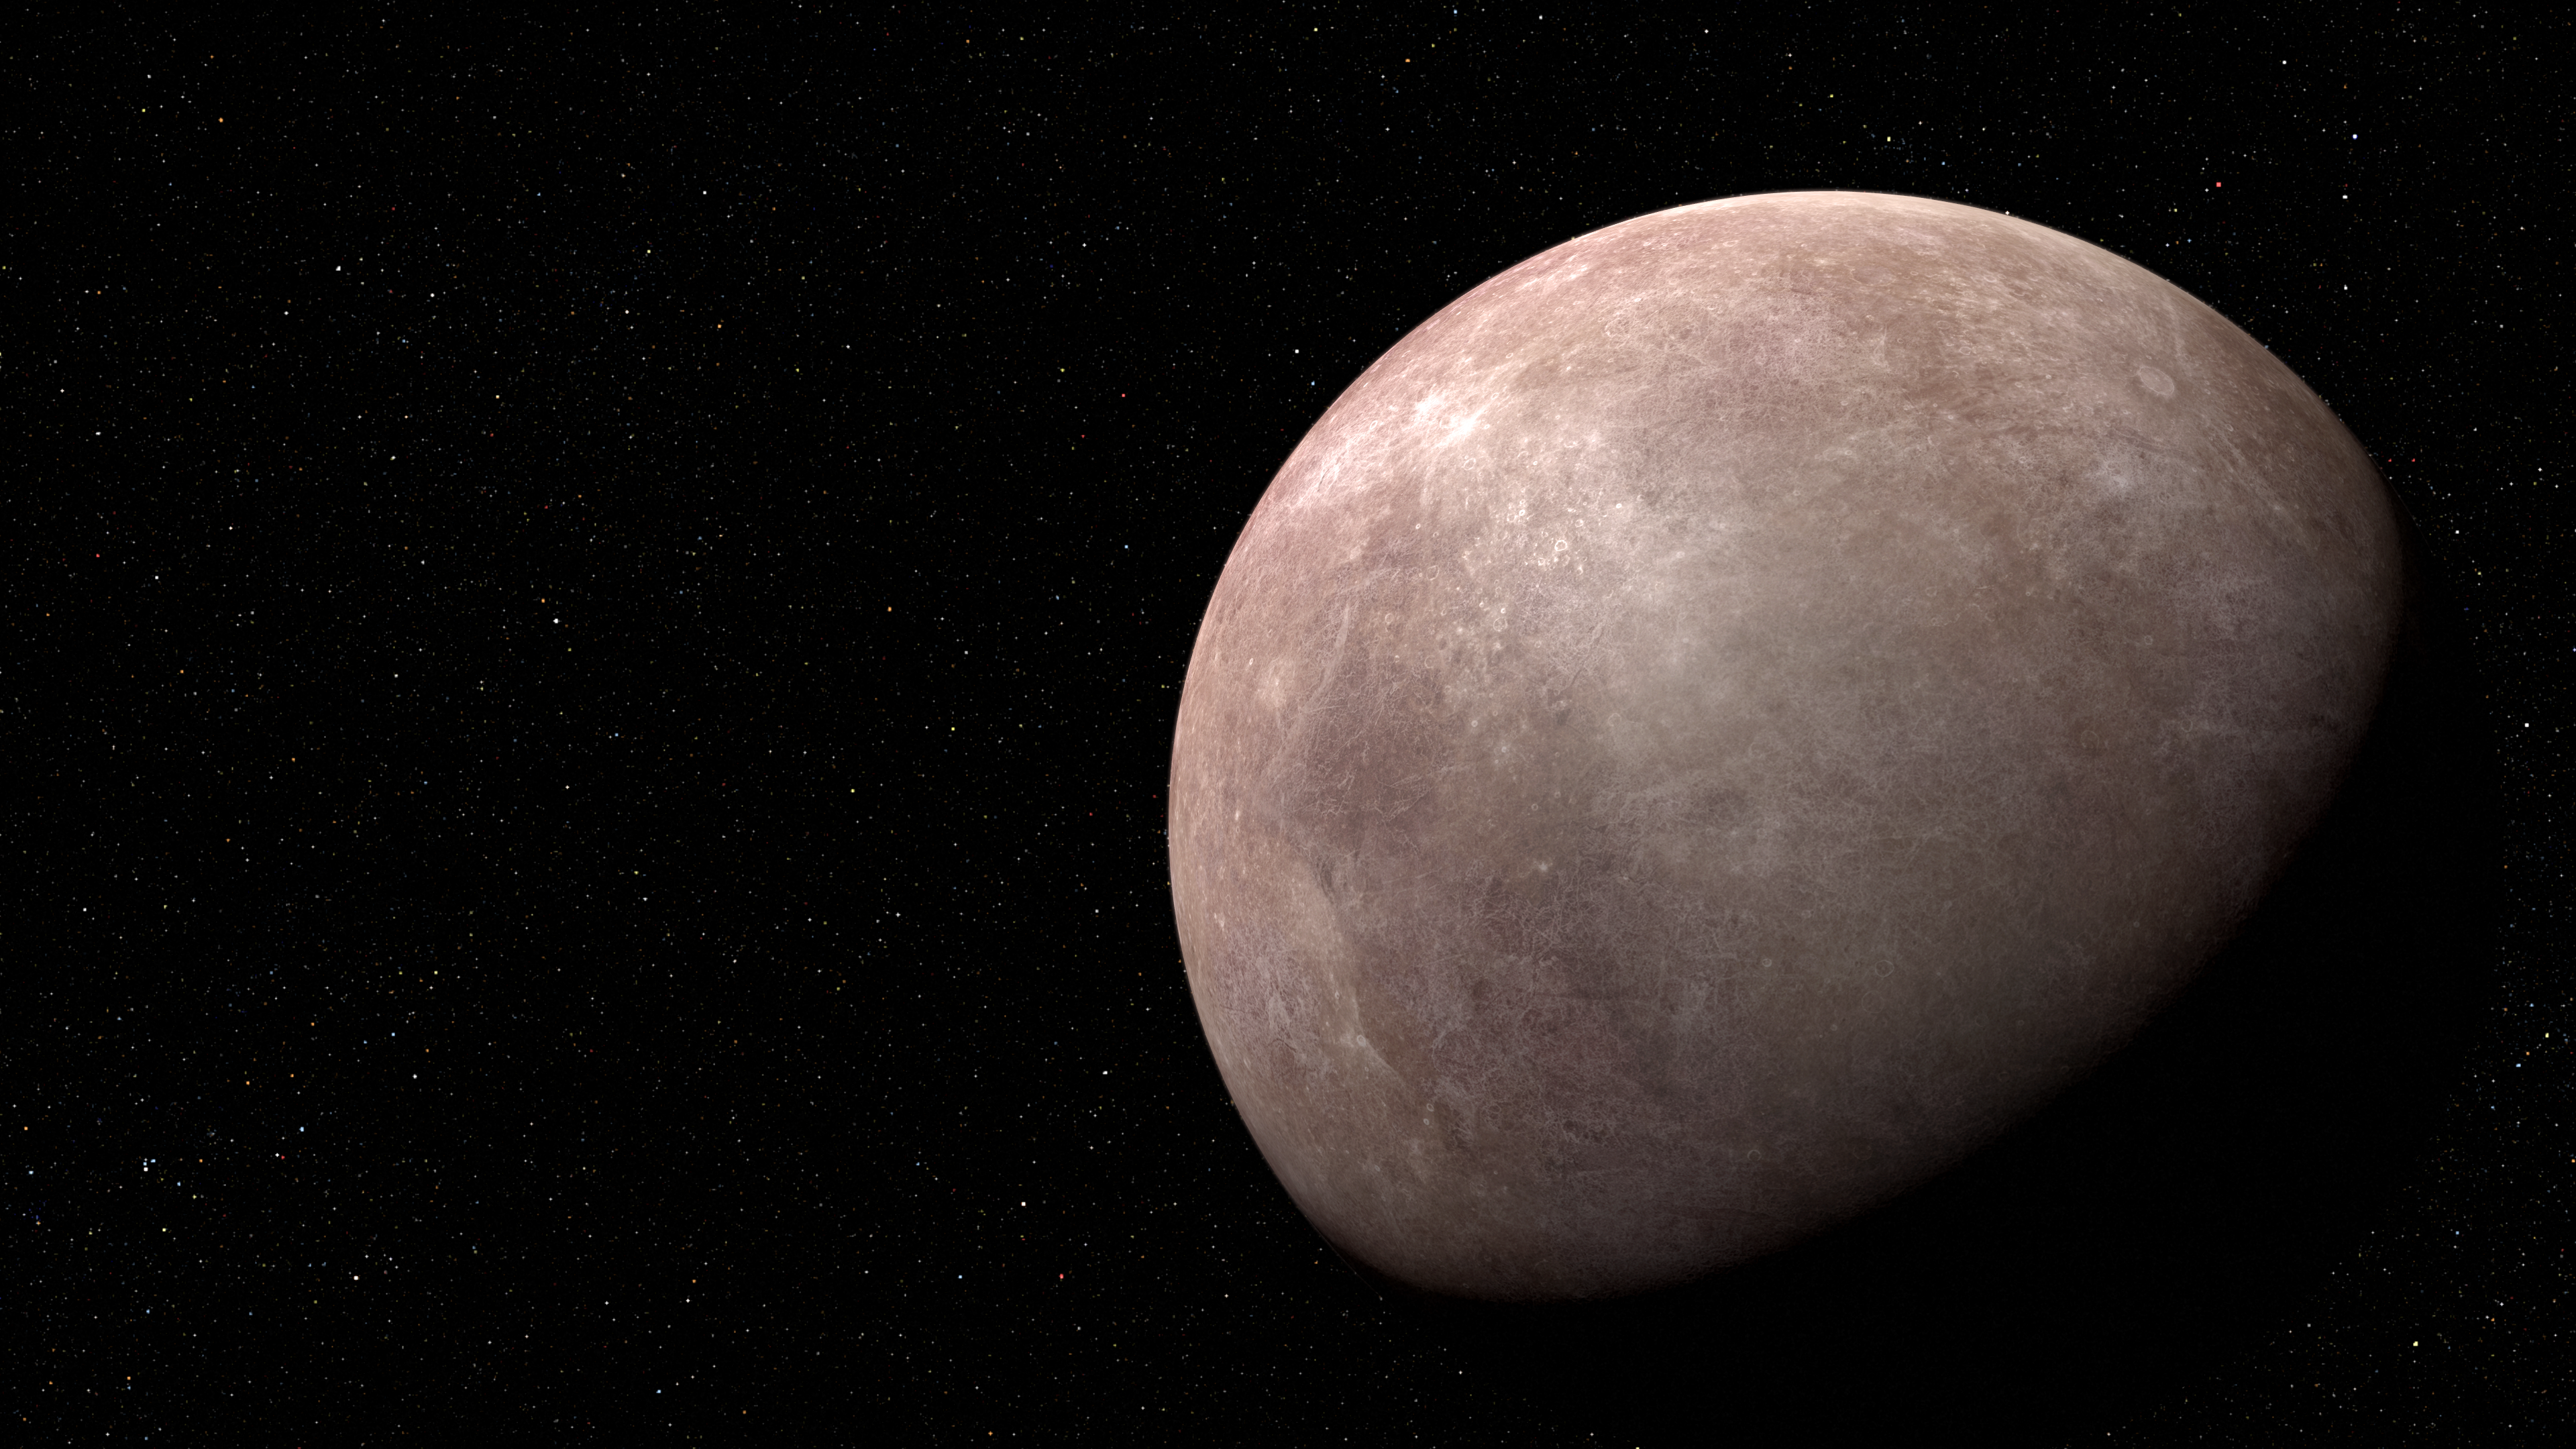

Exoplanet LHS 475 b (Illustration)

Based on new evidence from the NASA/ESA/CSA James Webb Space Telescope, this illustration shows the exoplanet LHS 475 b. It is rocky and almost precisely the same size as Earth. The planet whips around its star in just two days, far faster than any planet in the Solar System. Researchers will follow up this summer with additional observations with Webb, which they hope will allow them to definitively conclude if the planet has an atmosphere. LHS 475 b is relatively close, 41 light-years away, in the constellation Octans.

Credit: NASA, ESA, CSA, L. Hustak (STScI)